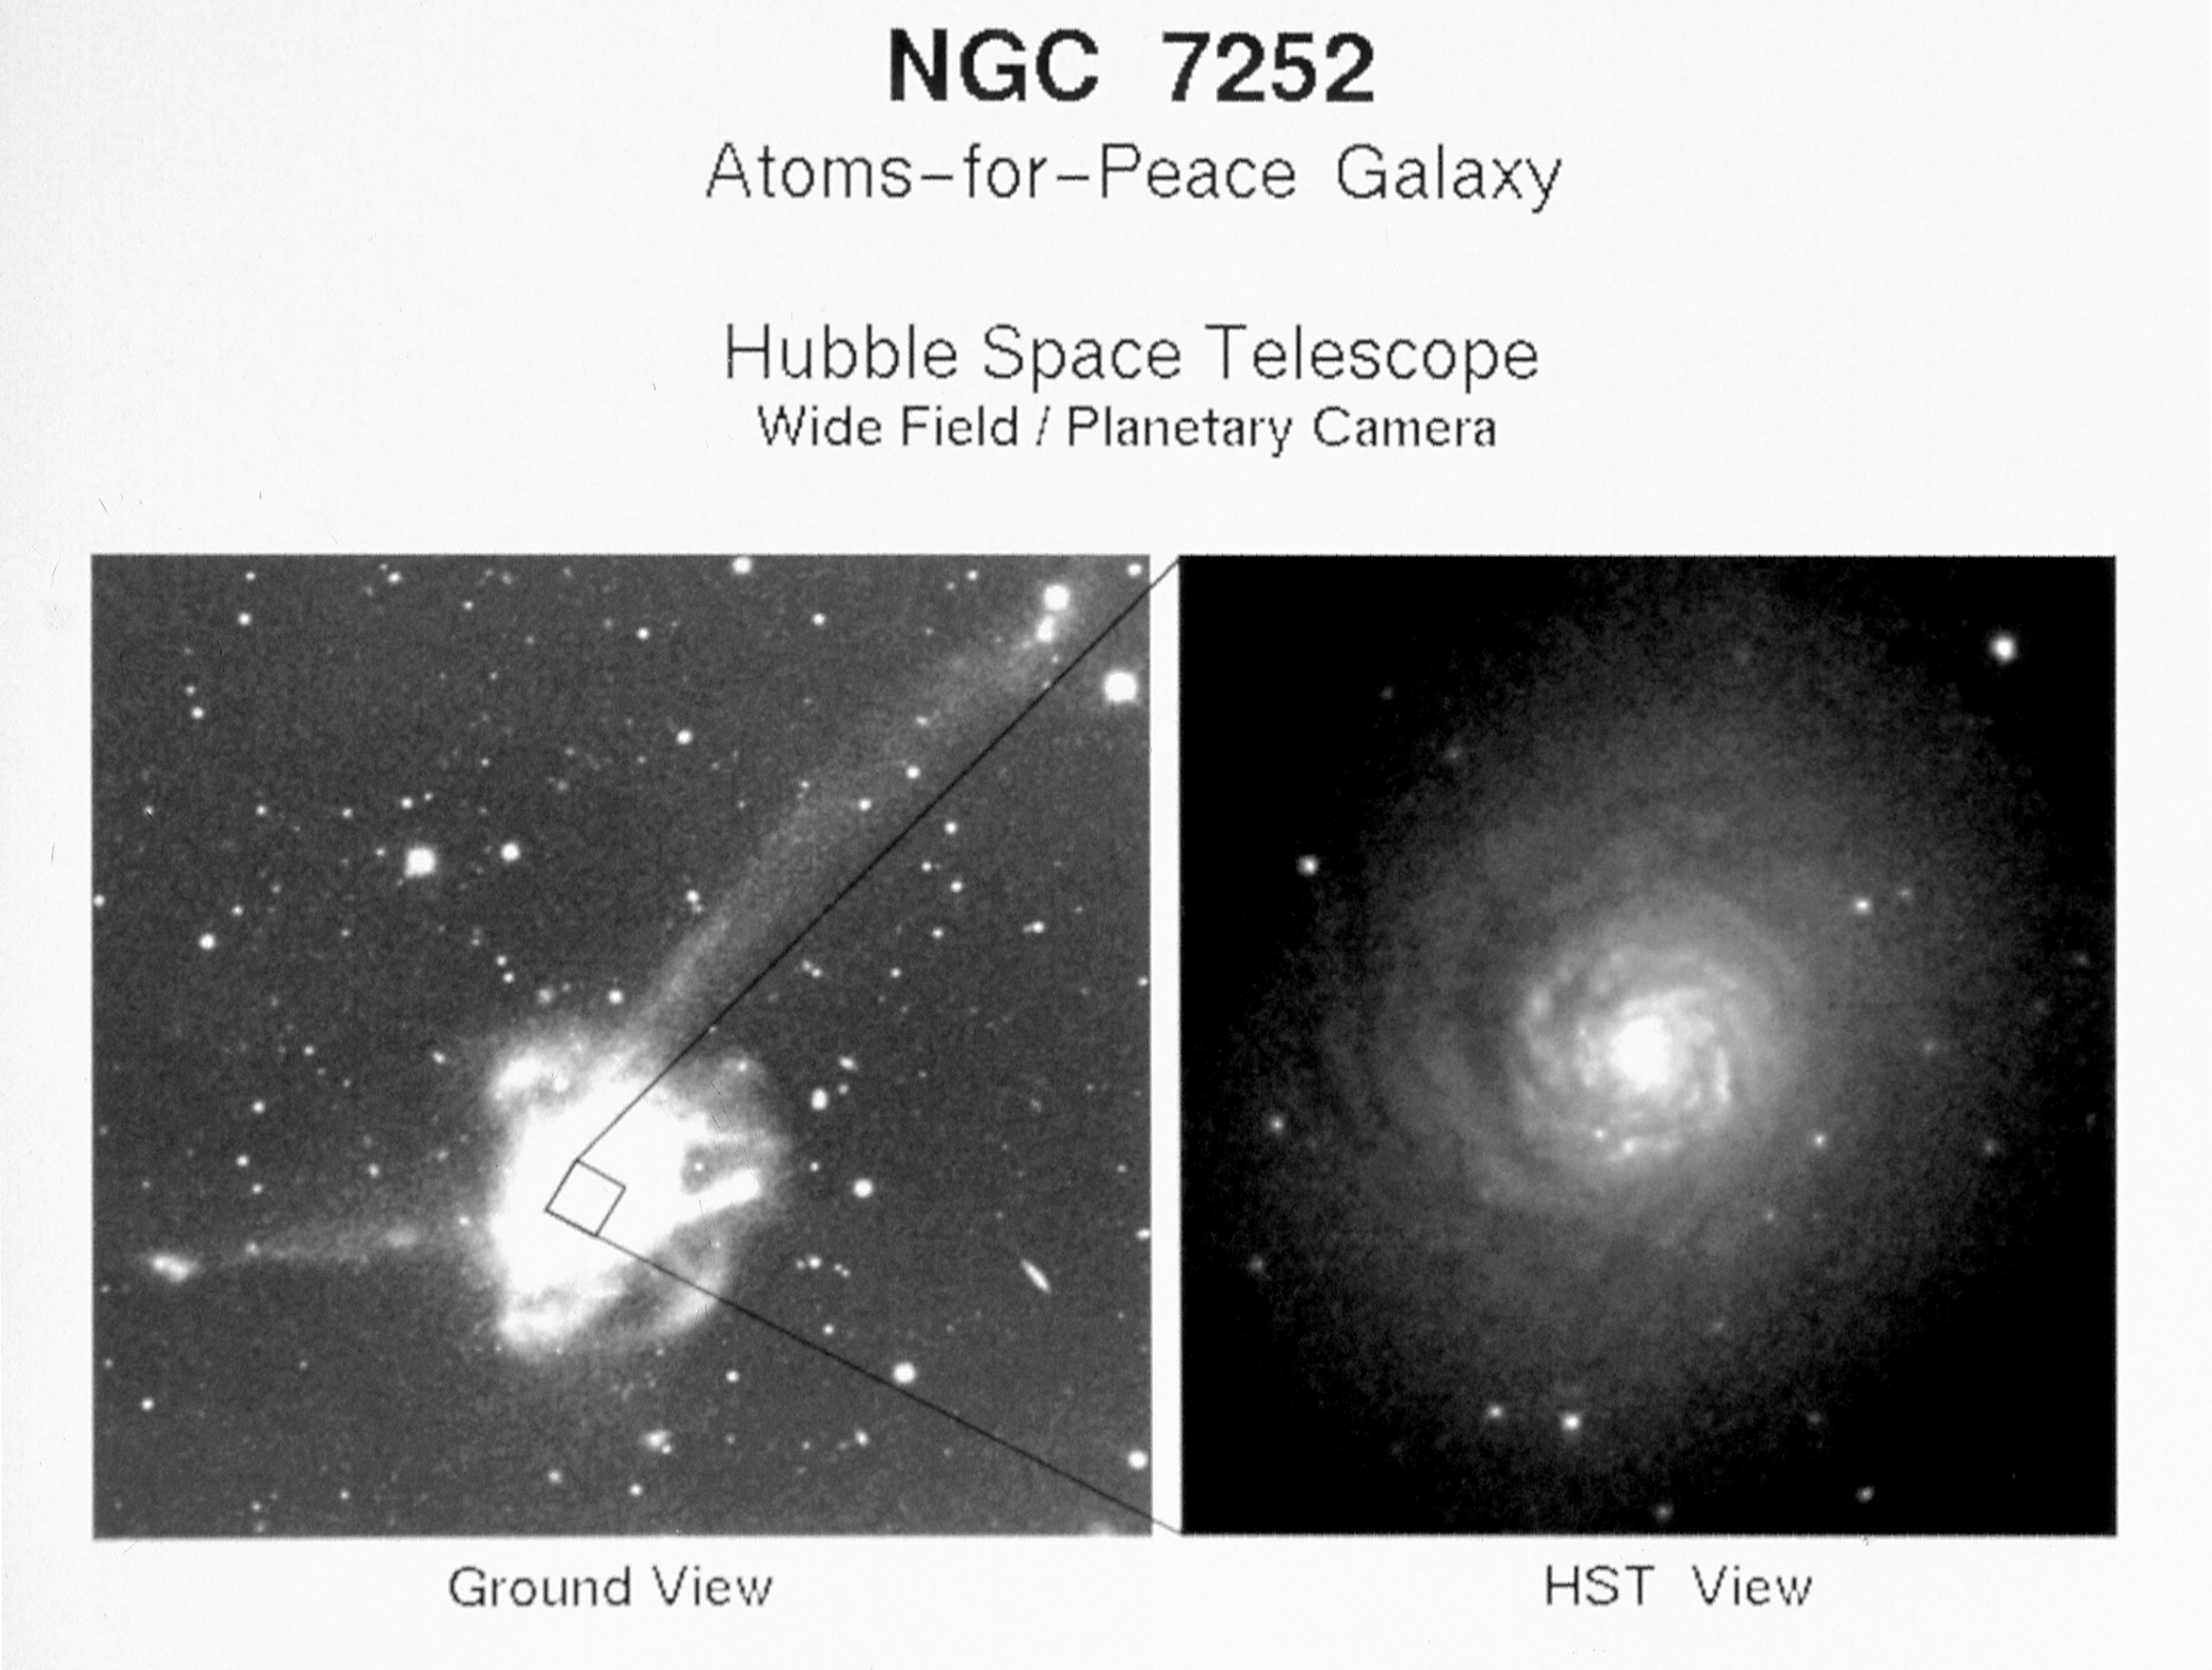

Spiral disk and globular star clusters at the core of a colliding galaxy

[Left] Ground-based Telescopic Photograph NGC 7252 has been considered the prototypical example of a merger between two disk-shaped galaxies. The galaxy has a pair of long tails that are unambiguous evidence of the effects of gravitational tidal forces from a galaxy merger. The galaxy is nicknamed the "Atoms-for-Peace" galaxy because its stars form a bizarre loop-like structure that resembles a schematic diagram of electrons orbiting an atomic nucleus. (In December 1953, U.S. President Dwight 0. Eisenhower made his "Atoms for Peace" speech to foster peaceful applications of nuclear energy.) The galaxy is located 300 million light-years away in the constellation Aquarius.

[Right] Hubble Space Telescope Planetary Camera Image of Galaxy CoreA NASA/ESA Hubble Space Telescope image of the core of the peculiar galaxy NGC 7252 reveals a striking "mini-spiral" disk of gas and stars, and about 40 exceptionally bright and young globular star clusters.

Credit: Dr. Francois Schweizer, taken with 4-meter telescope at the Cerro Tololo Inter-American Observatory.